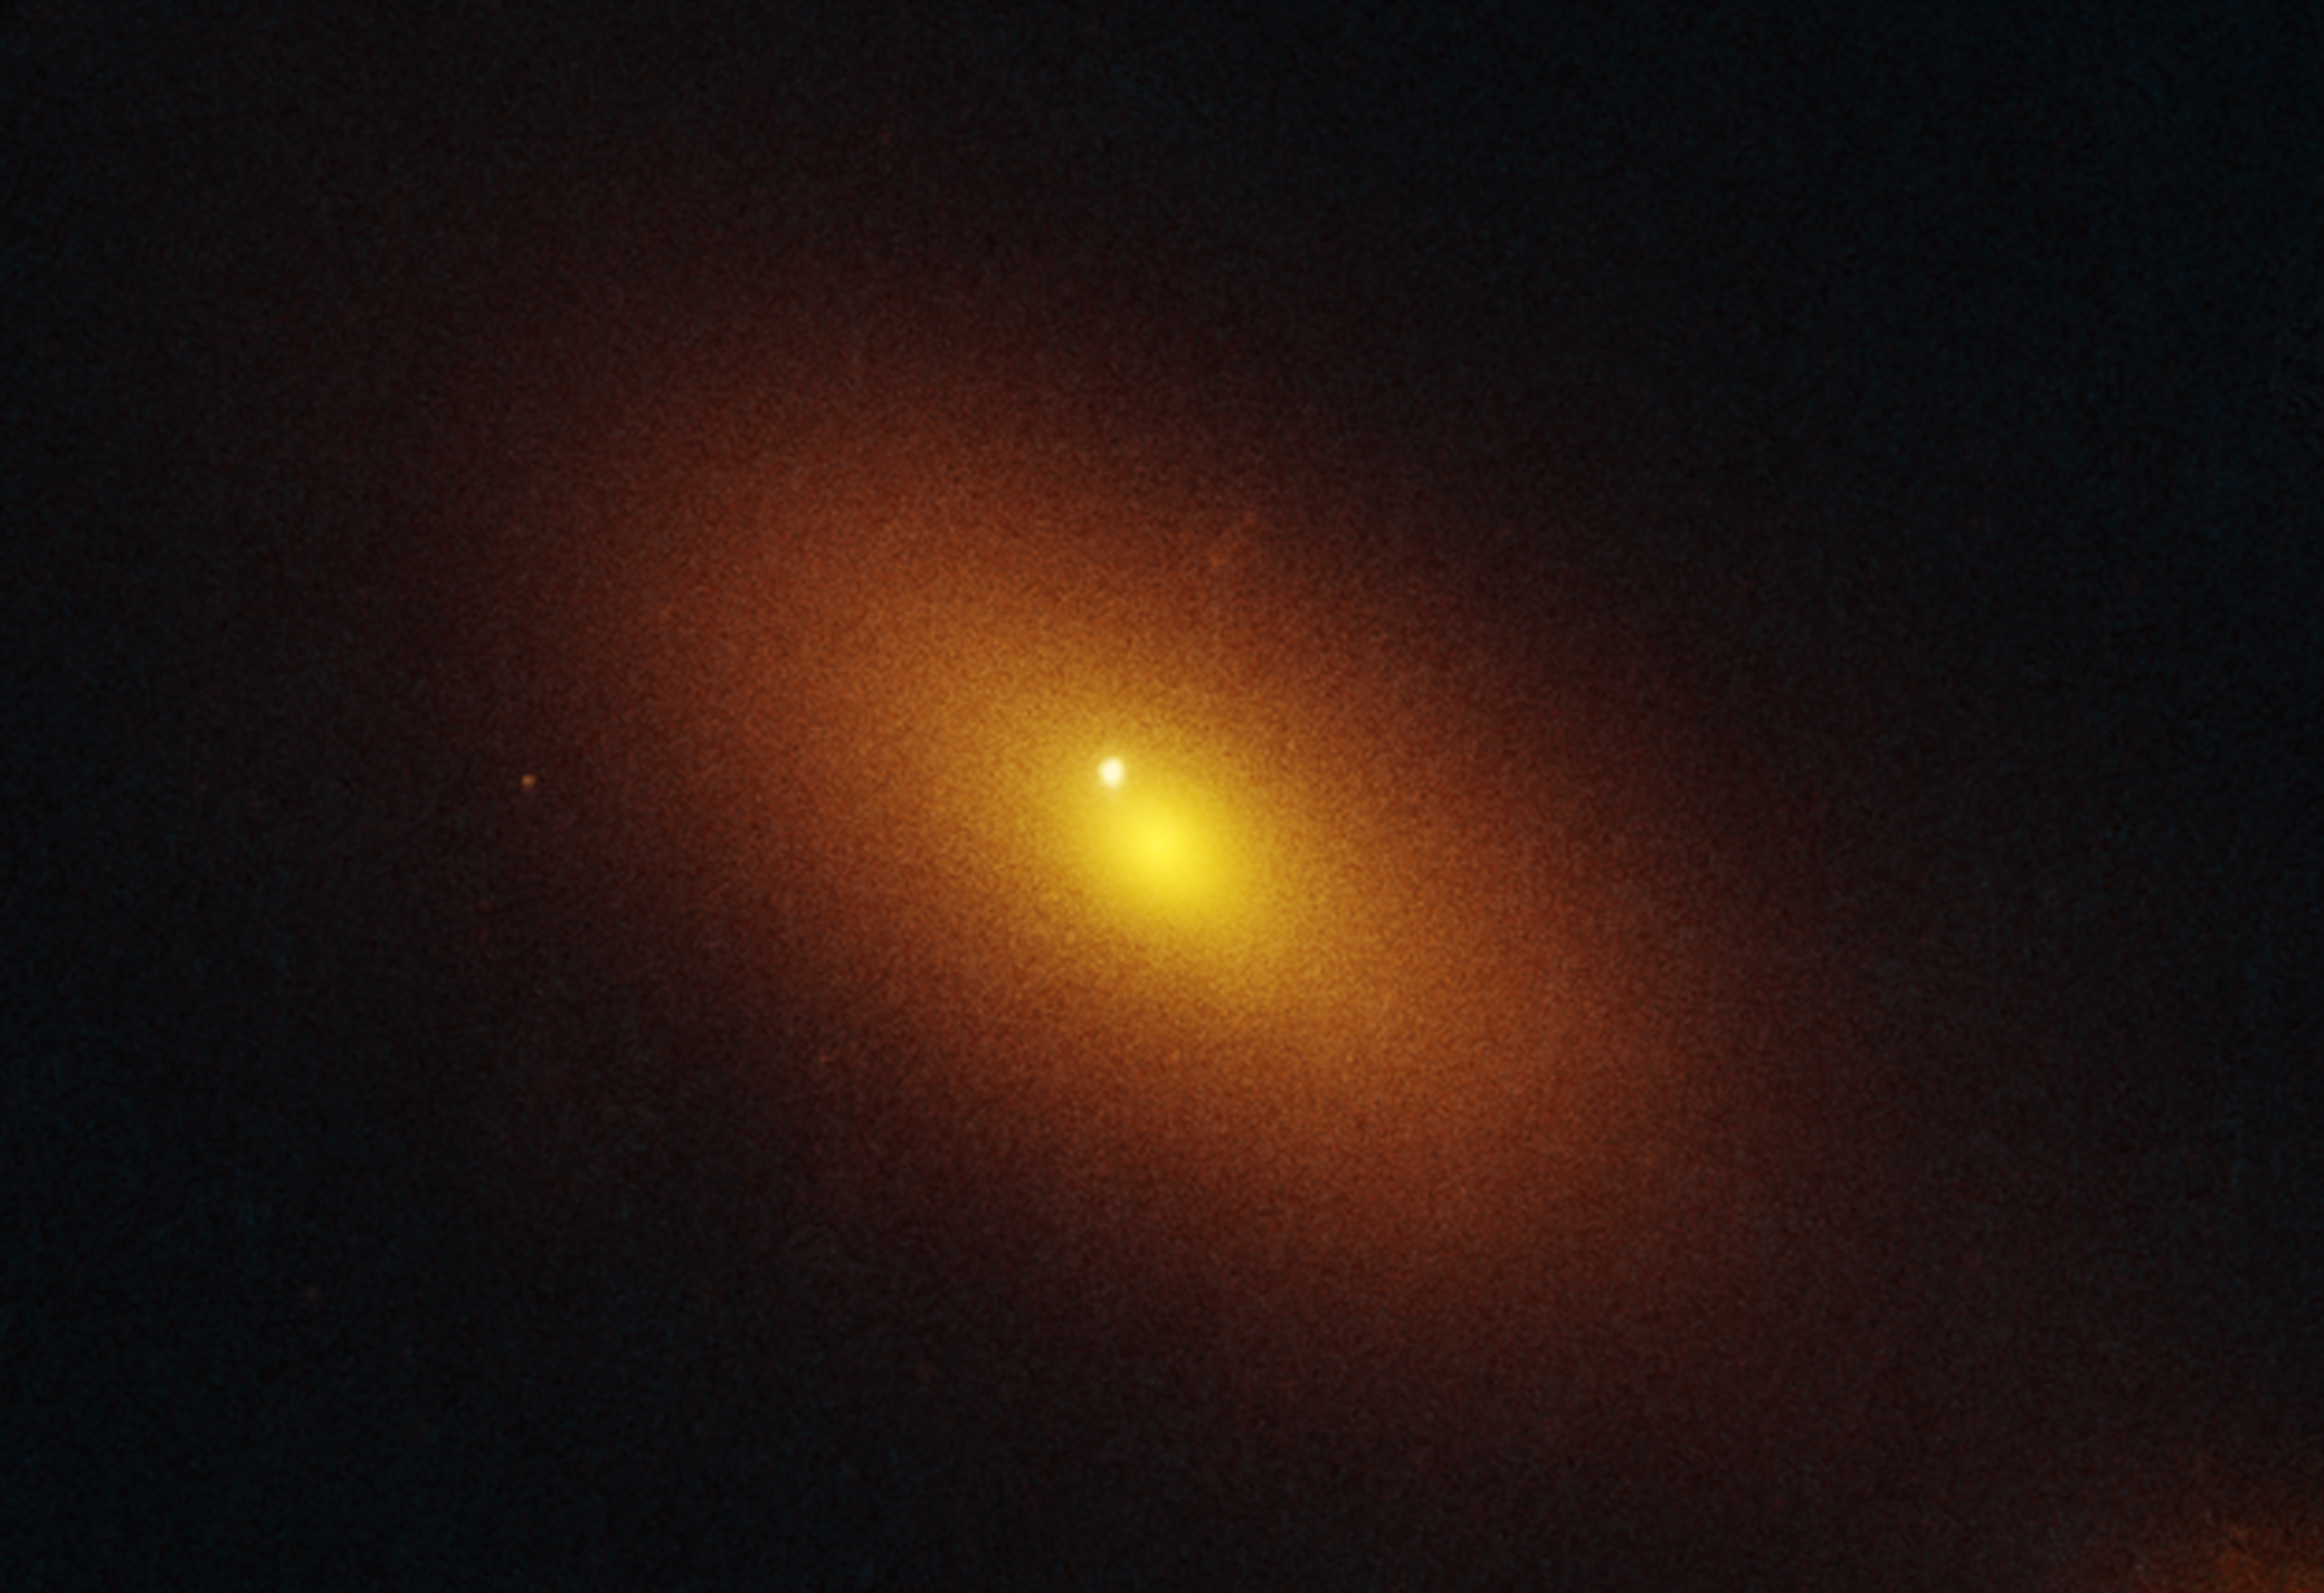

Hubble observes new tidal disruption event (January 2025 image)

Lurking 600 million light-years away, within the inky black depths between stars, there is an invisible monster gulping down any wayward star that plummets toward it. The black hole revealed its presence in a newly identified tidal disruption event (TDE) where a hapless star was ripped apart and swallowed in a spectacular burst of radiation. These disruption events are powerful probes of black hole physics, revealing the conditions necessary for launching jets and winds when a black hole is in the midst of consuming a star, and are seen as bright objects by telescopes.

The new TDE, called AT2024tvd, allowed astronomers to pinpoint a wandering supermassive black hole using the NASA/ESA Hubble Space Telescope, with similar supporting observations from NASA’s Chandra X-Ray Observatory, and the NRAO Very Large Array telescope that also showed that the black hole is offset from the center of the galaxy.

Surprisingly, this one million-solar-mass black hole doesn’t reside exactly in the center of the host galaxy, where supermassive black holes are typically found, and actively gobble up surrounding material. Out of approximately 100 TDE events recorded by optical sky surveys so far, this is the first time an offset TDE has been identified. The rest are associated with the central black holes of galaxies.

In fact, at the center of the host galaxy there is a different supermassive black hole weighing 100 million times the mass of the Sun. Hubble’s optical precision shows the TDE was only 2,600 light-years from the more massive black hole at the galaxy’s center. That’s just one-tenth the distance between our Sun and the Milky Way’s central supermassive black hole.

Above is a NASA/ESA Hubble Space Telescope image of the galaxy located that is host to the roaming supermassive black hole. The TDE appears as an isolated blue point source of ultraviolet light, while the galaxy is colored orange in visible light. The source is one of the first examples of a TDE significantly offset from the host galaxy’s core by 2,600 light years – where an even more massive active black resides. Hubble’s precise angular resolution clearly shows this offset and confirms independent observations made with NASA’s Chandra X-ray observatory. The Hubble data was captured on 16 January 2025, with Hubble’s WFC3 detector in UV and visible light wavelengths.

The paper will be published in an upcoming issue of the Astrophysical Journal Letters.

Credit: NASA, ESA, Y. Yao (UC Berkeley)